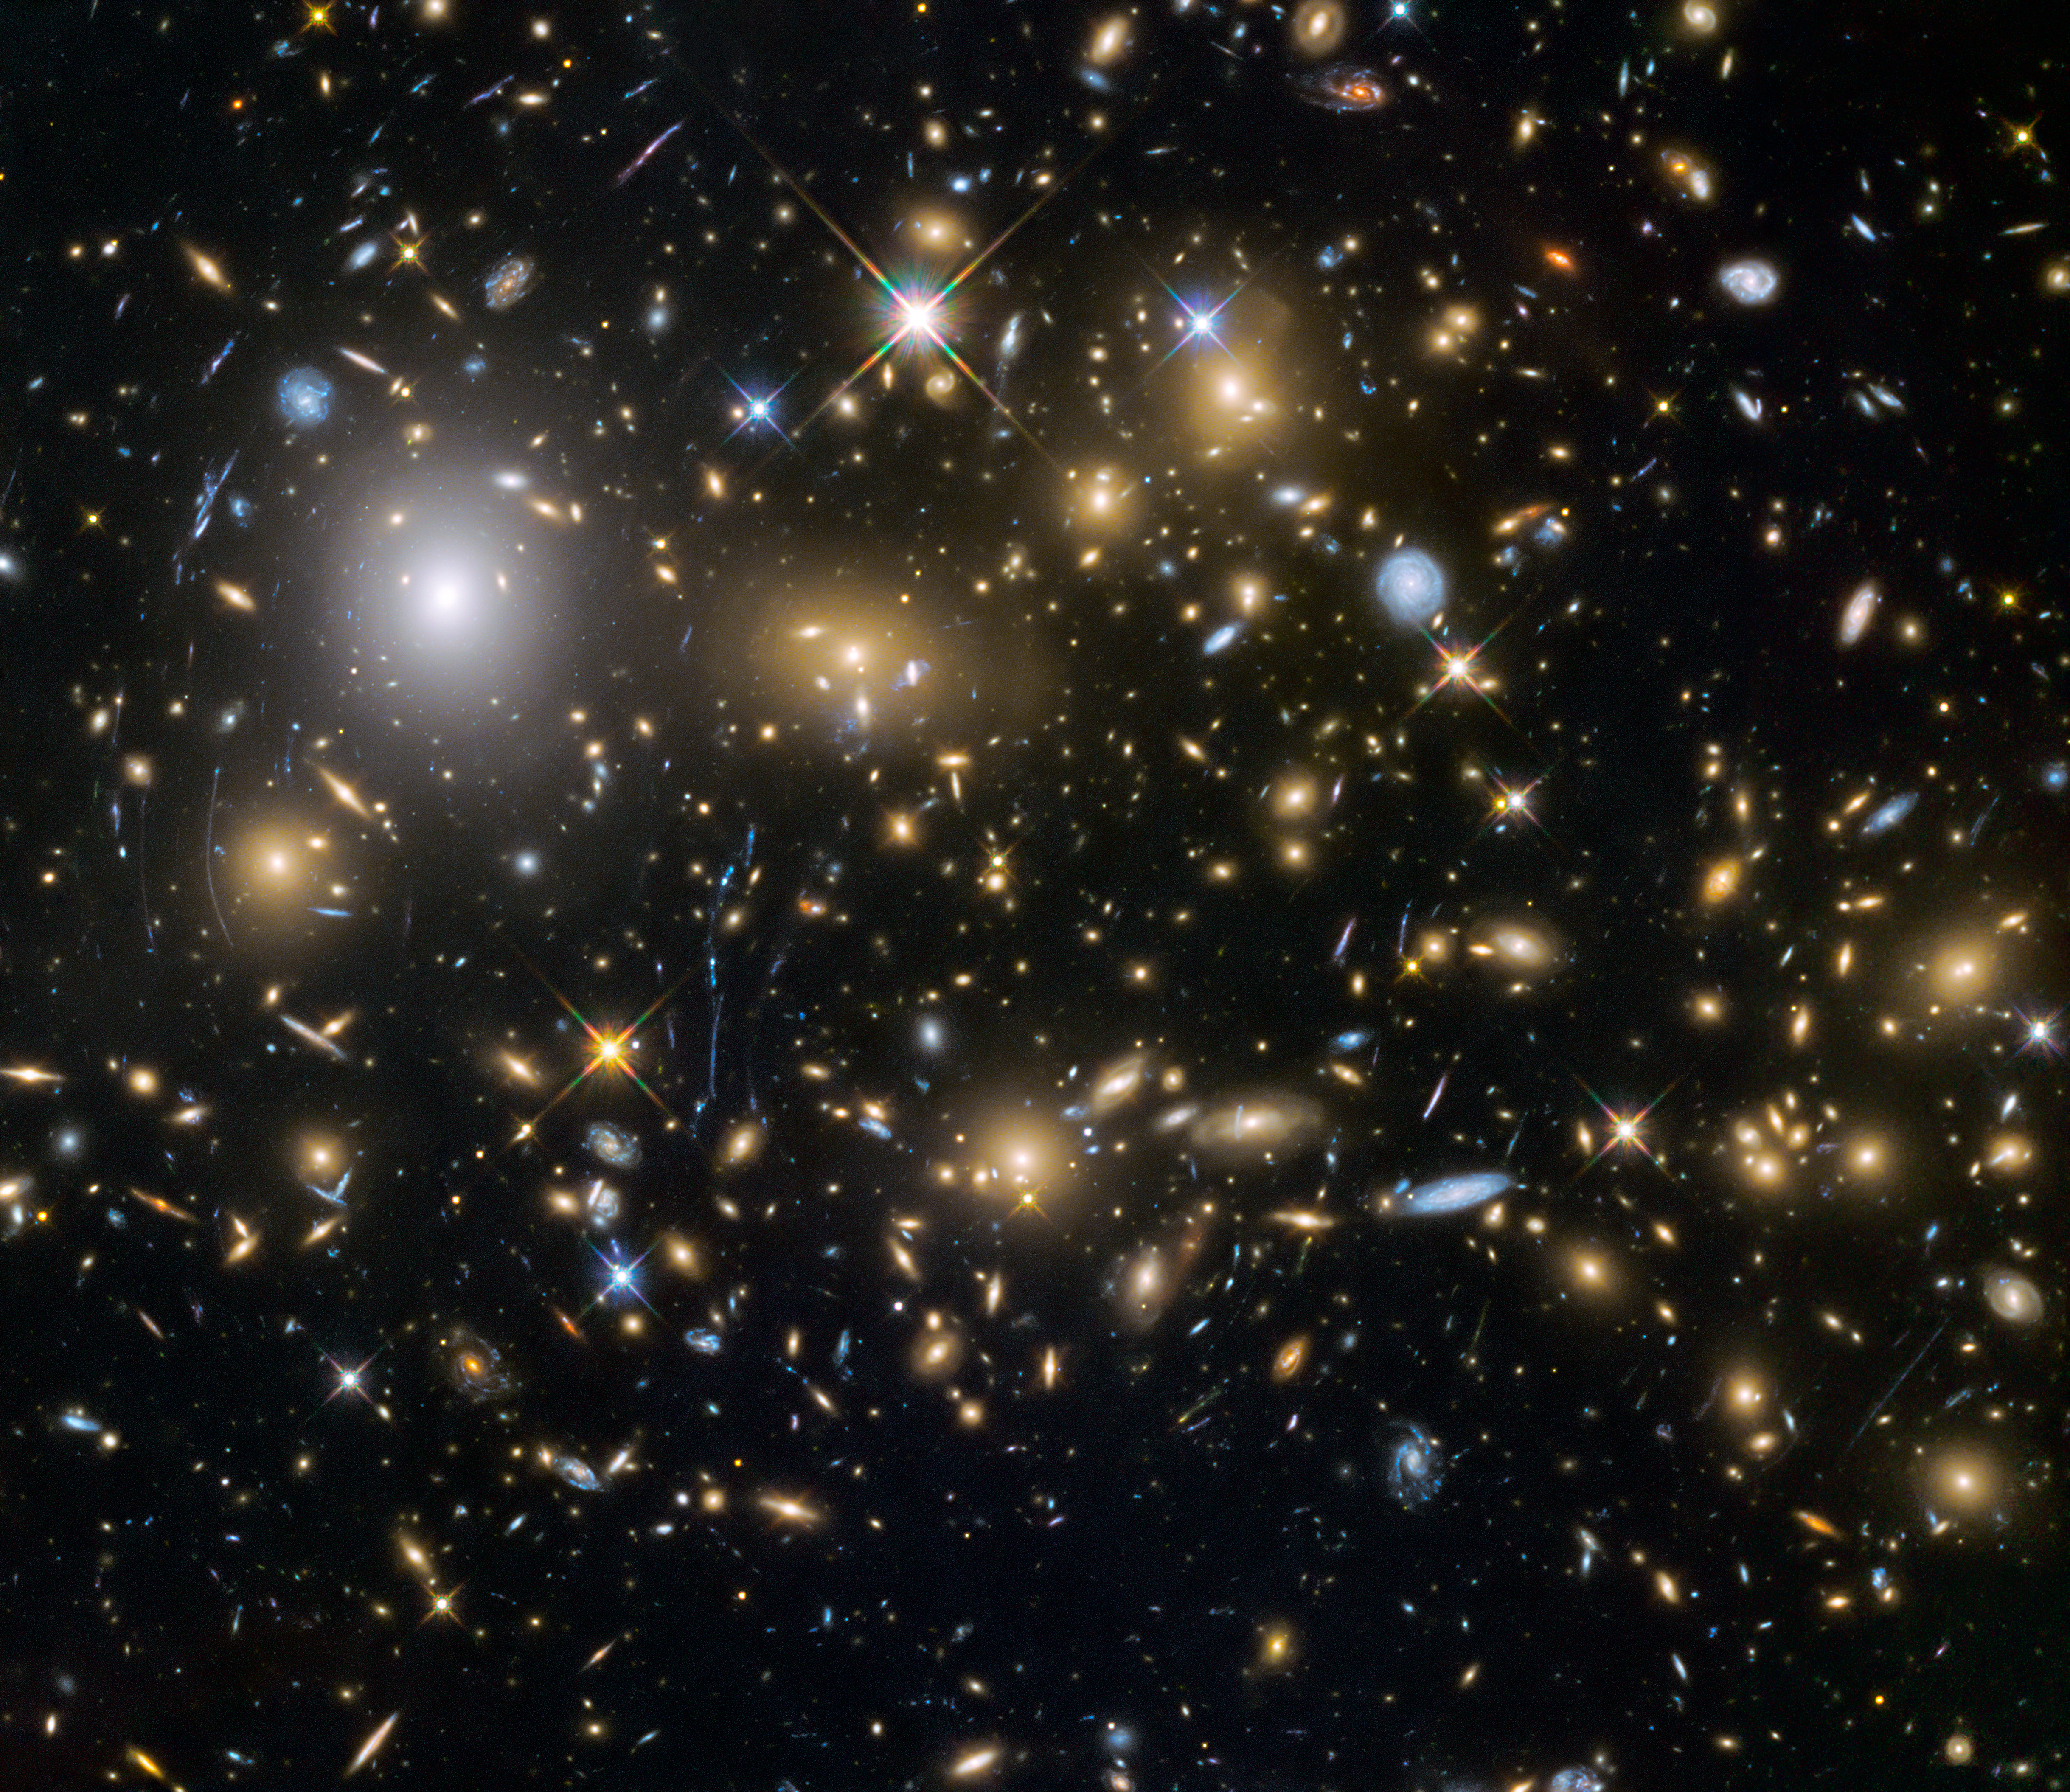

Hubble Frontier Fields view of MACSJ0717.5+3745

This image from the NASA/ESA Hubble Space Telescope shows the galaxy cluster MACSJ0717.5+3745. This is one of six being studied by the Hubble Frontier Fields programme, which together have produced the deepest images of gravitational lensing ever made.

Due to the huge mass of the cluster it is bending the light of background objects, acting as a magnifying lens. It is one of the most massive galaxy clusters known, and it is also the largest known gravitational lens. Of all of the galaxy clusters known and measured, MACS J0717 lenses the largest area of the sky.

Credit: NASA, ESA and the HST Frontier Fields team (STScI)